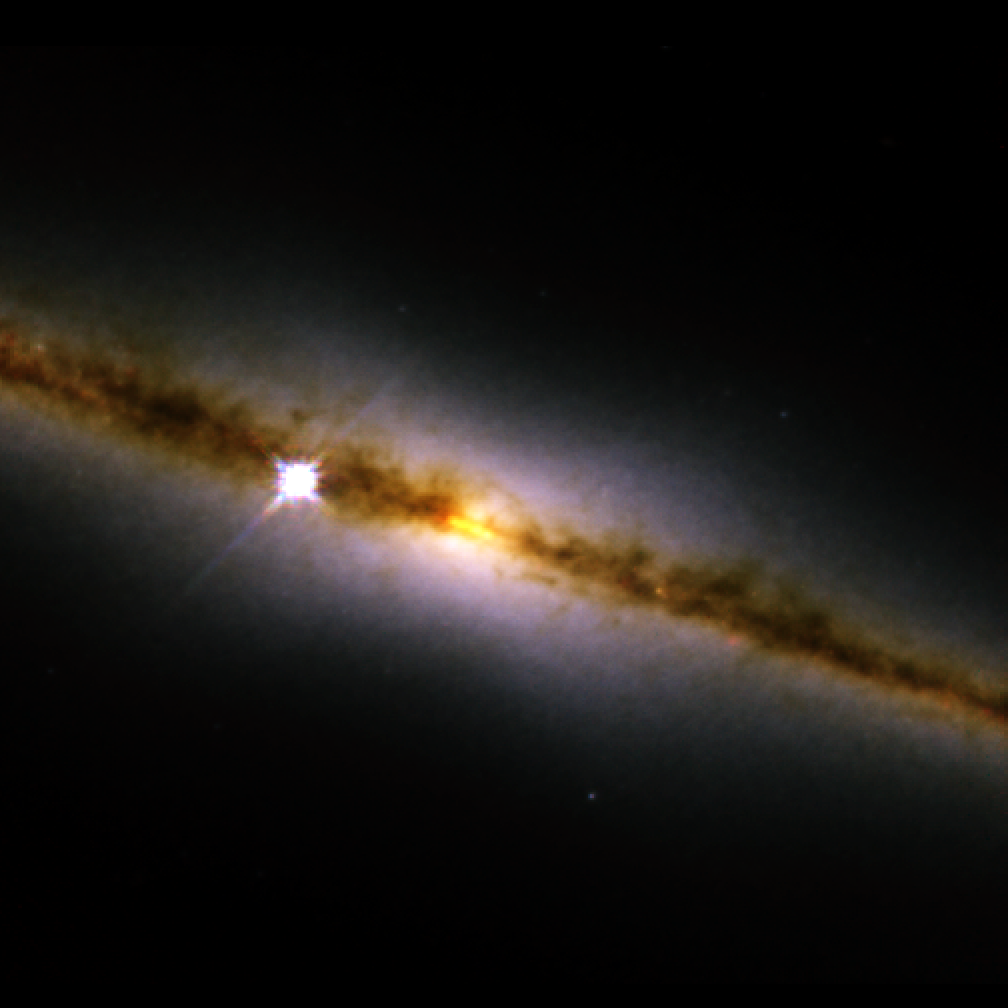

NICMOS finds a golden ring at the heart of a galaxy (NICMOS image)

The revived Near Infrared Camera and Multi-Object Spectrometer (NICMOS) aboard the NASA/ESA Hubble telescope has penetrated the dusty disc of the 'edge-on' galaxy NGC 4013 and looked right into the galactic core. To the surprise of astronomers, NICMOS found a brilliant band-like structure, that may be a ring of newly formed stars [yellow band in photo] seen edge-on.

NICMOS enables the Hubble telescope to see near-infrared wavelengths of light, so that it can penetrate the dust that obscures the inner hub of the galaxy. The ring-like structure seen by NICMOS encircles the core and is about 720 light-years wide, which is the typical size of most star-forming rings found in disc galaxies.

The human eye cannot see infrared light so colours have been assigned to correspond to near-infrared wavelengths. The blue light represents shorter near-infrared wavelengths and the red light corresponds to longer wavelengths.

NGC 4013, which looks similar to our Milky Way Galaxy, resides in the constellation Ursa Major, 55 million light-years from Earth.

This image, taken on 12 May 2002, is a colour composite image that was made by combining photographs taken through J-band, H-band, and Paschen-alpha filters.

Credit: NASA, ESA, the NICMOS Group (STScI, ESA) and the NICMOS Science Team (Univ. of Arizona)